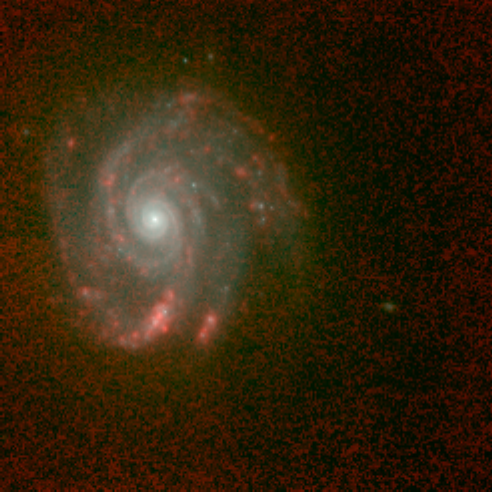

Hubble's Infrared Galaxy Gallery. A View of NGC 5653

Astronomers have used the NASA/ESA Hubble Space Telescope to produce an infrared 'photo essay' of spiral galaxies. By penetrating the dust clouds swirling around the centers of these galaxies, the telescope’s infrared vision is offering fresh views of star birth.

Credit: Torsten Boeker, Space Telescope Science Institute, and NASA/ESA